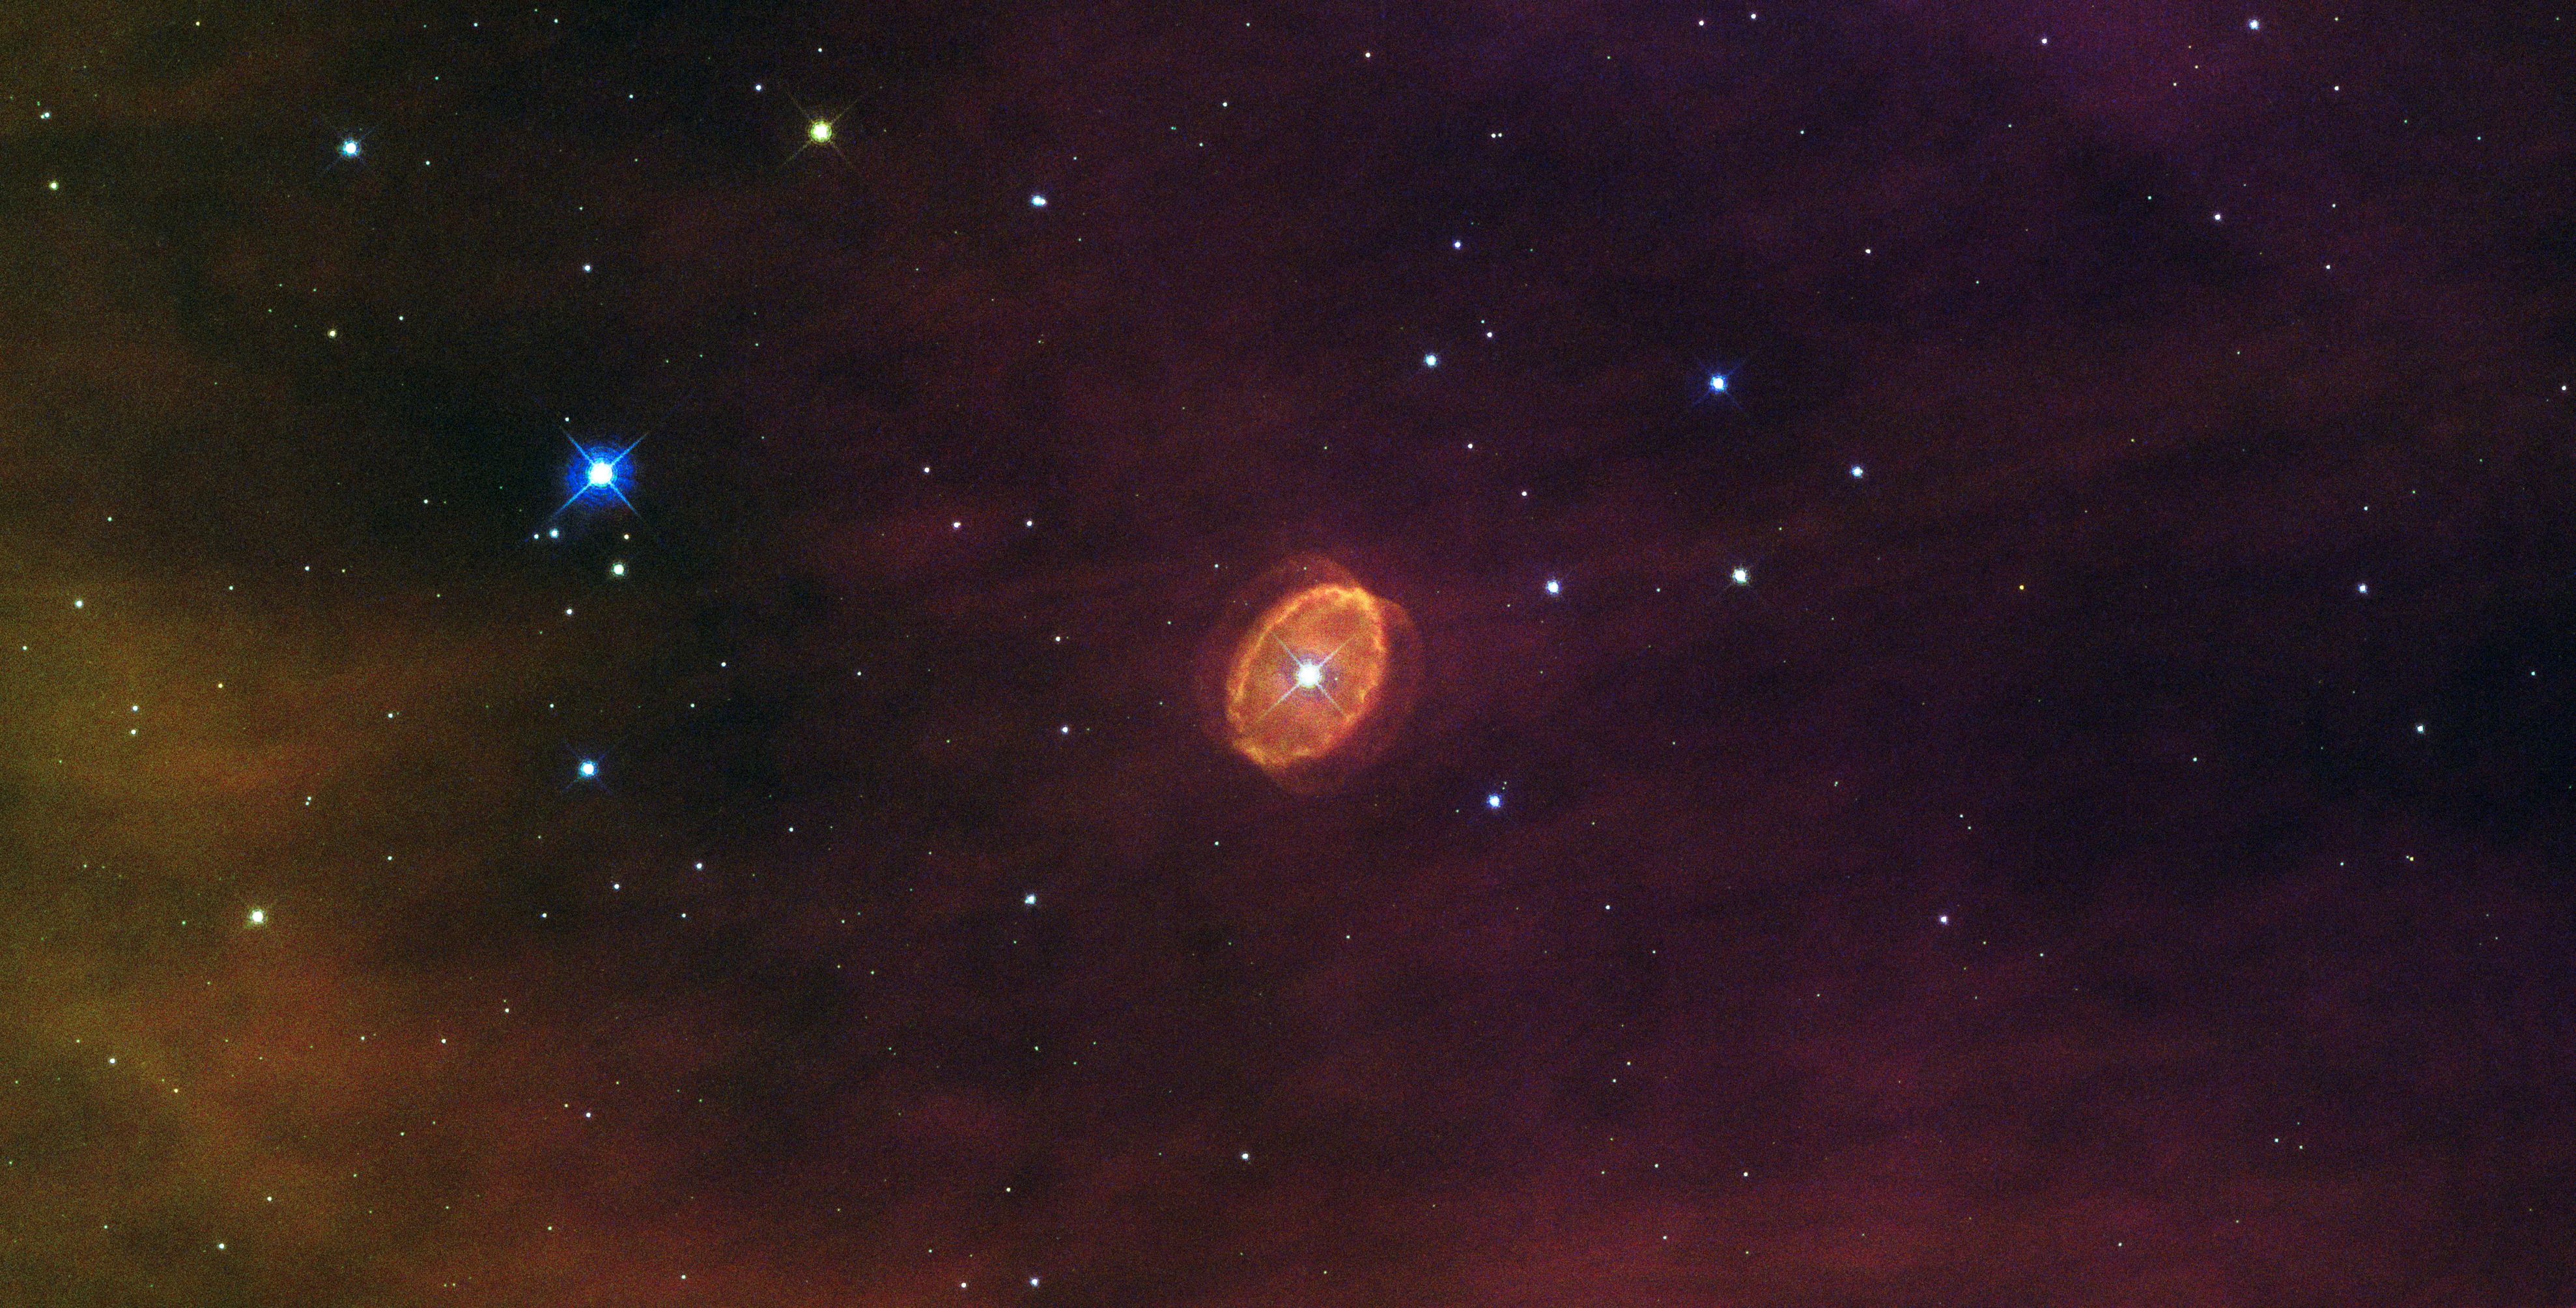

A star set to explode

Floating at the centre of this new Hubble image is a lidless purple eye, staring back at us through space. This ethereal object, known officially as [SBW2007] 1 but sometimes nicknamed SBW1, is a nebula with a giant star at its centre. The star was originally twenty times more massive than our Sun, and is now encased in a swirling ring of purple gas, the remains of the distant era when it cast off its outer layers via violent pulsations and winds.

But the star is not just any star; scientists say that it is destined to go supernova! 26 years ago, another star with striking similarities went supernova — SN 1987A. Early Hubble images of SN 1987A show eerie similarities to SBW1. Both stars had identical rings of the same size and age, which were travelling at similar speeds; both were located in similar HII regions; and they had the same brightness. In this way SBW1 is a snapshot of SN1987a's appearance before it exploded, and unsurprisingly, astronomers love studying them together.

At a distance of more than 20 000 light-years it will be safe to watch when the supernova goes off. If we are very lucky it may happen in our own lifetimes...

Versions of this image were entered into the Hubble's Hidden Treasures image processing competition by contestants Nick Rose and Steve Byrne.

Credit: ESA/Hubble & NASA Acknowledgements: Nick Rose/Steve Byrne